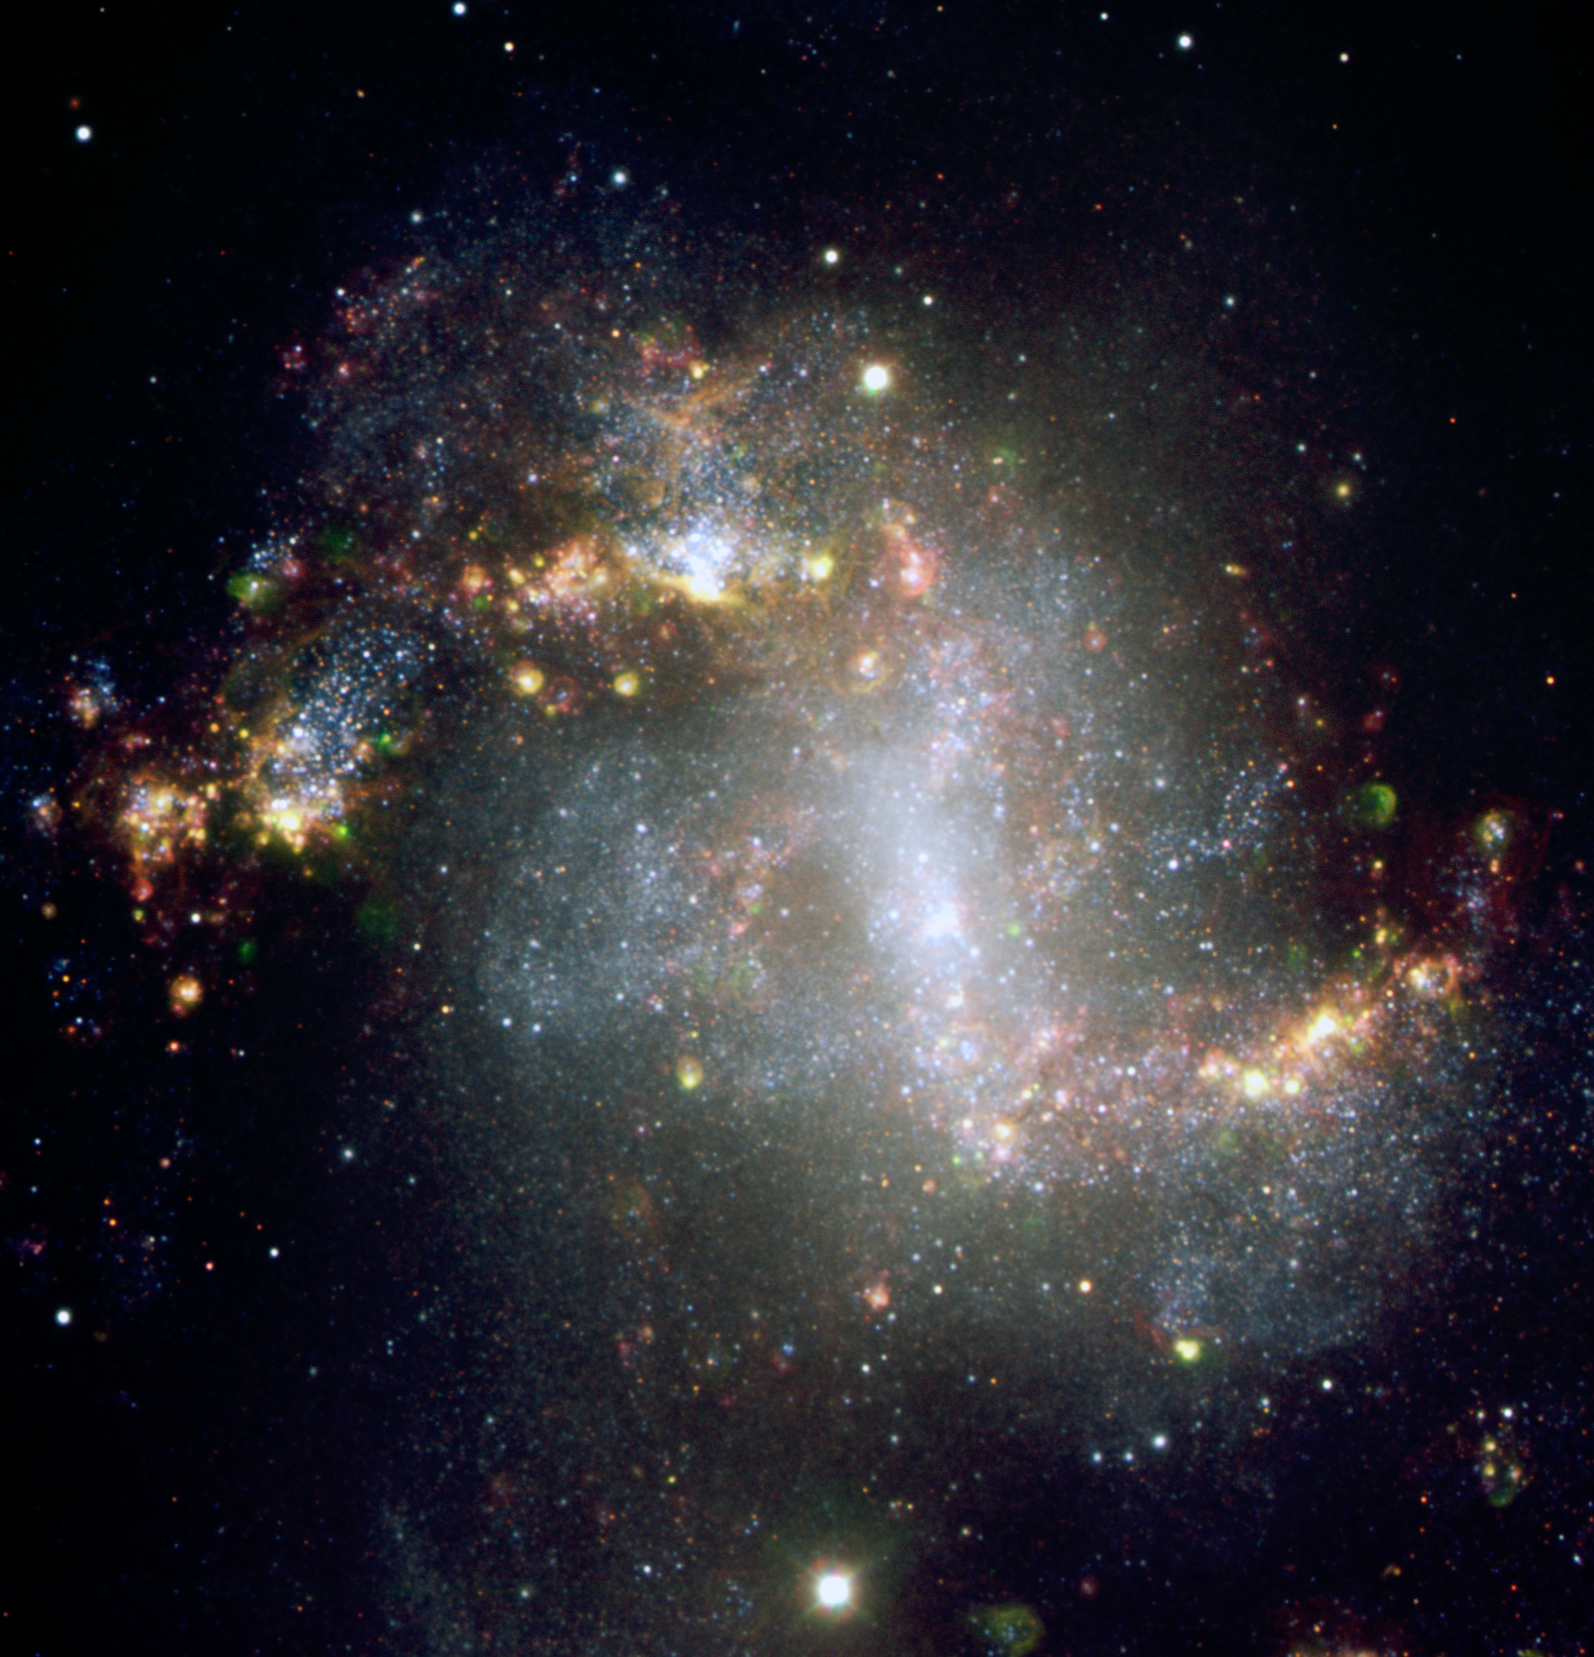

Barred Spiral Galaxy NGC 1313 - VLT

This is a view of the barred spiral galaxy NGC 1313 taken with the the European Southern Observatory's Very Large Telescope (VLT) in Chile on Dec. 16, 2003 through various broad-band (B, R, z) and narrow-band filters (H-alpha, [o I], [O III]). The colour composited image was made by assigning B to the blue channel, [O I] and [O III] to the green channel, and R, z, and H-alpha to the red channel. This gives many of the nebulous shells along the outer spiral arms a yellow/red hue. The outline of the central region indicates the area observed with Hubble's Advanced Camera for Surveys.

Credit: H. Boffin (FORS/VLT/ESO)